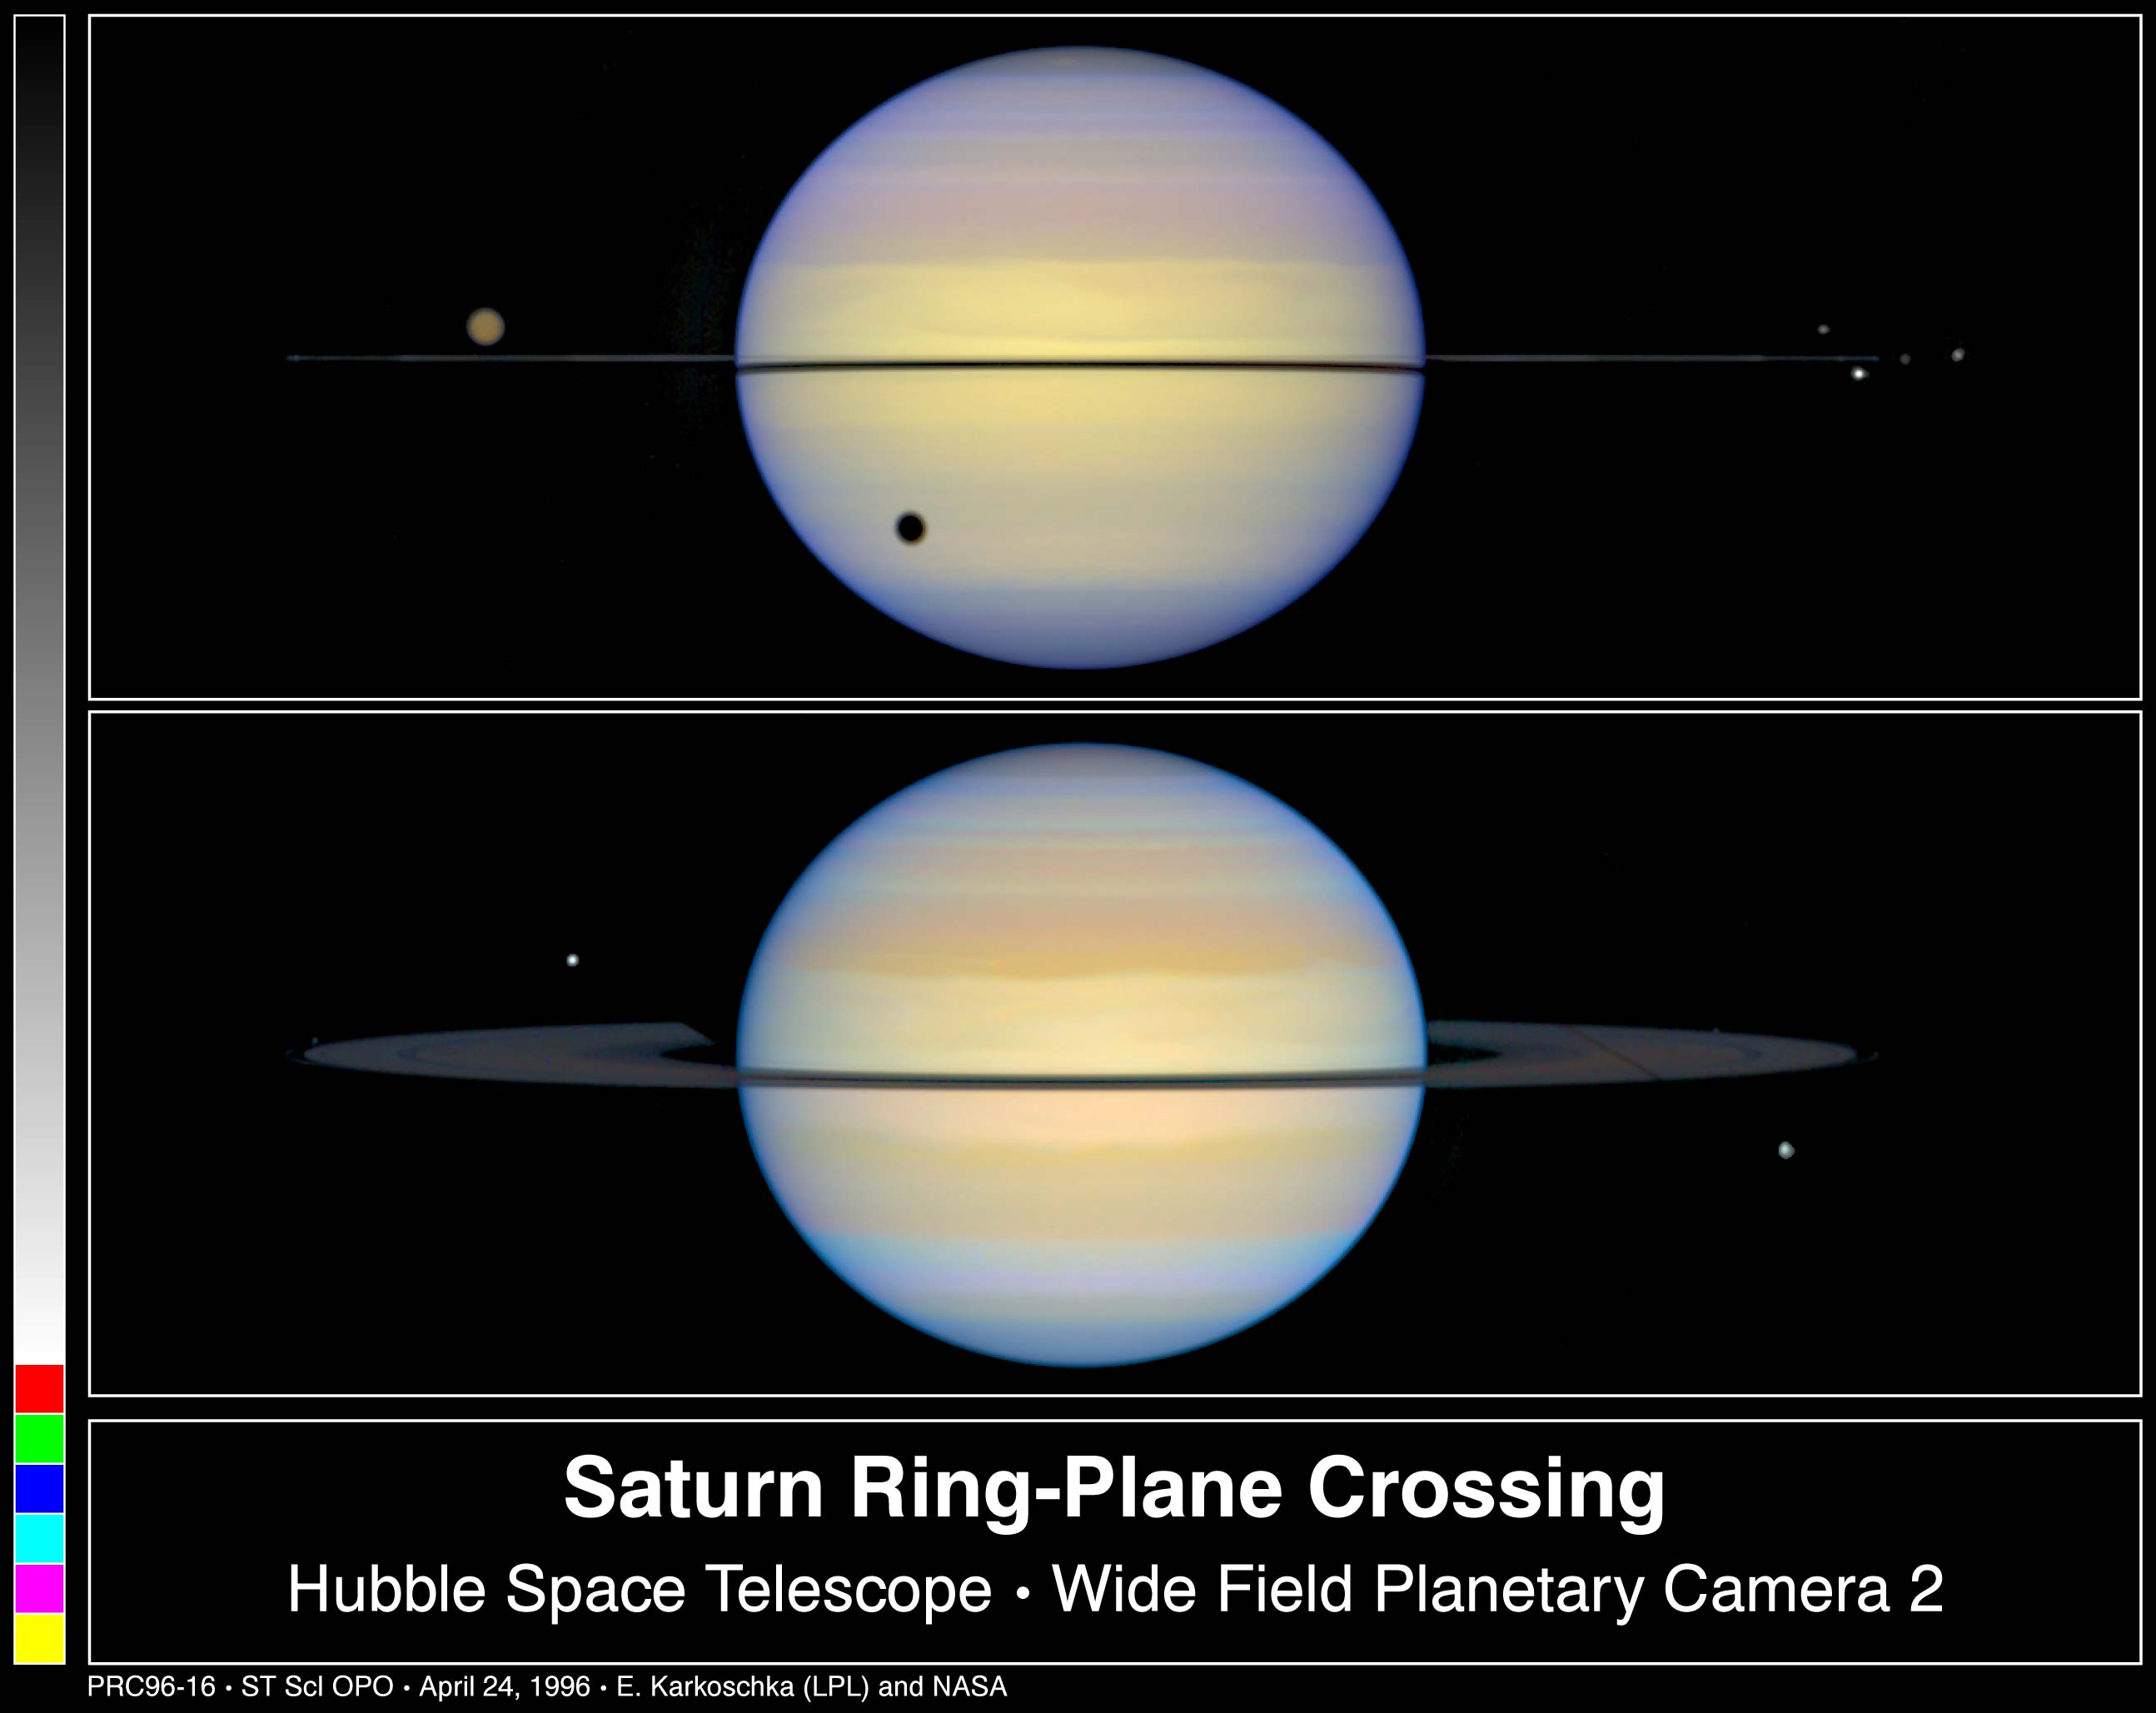

Edge-On View of Saturn's Rings

Top Image

This is a Hubble Space Telescope snapshot of Saturn with its rings barely visible. Normally, astronomers see Saturn with its rings tilted. Earth was almost in the plane of Saturn's rings, thus the rings appear edge-on.

Bottom Image

This photograph shows Saturn with its rings slightly tilted. The moon called Dione, on the lower right, is casting a long, thin shadow across the whole ring system due to the setting Sun on the ring plane. The moon on the upper left of Saturn is Tethys.

Credit: Erich Karkoschka (University of Arizona Lunar & Planetary Lab)and NASA/ESA